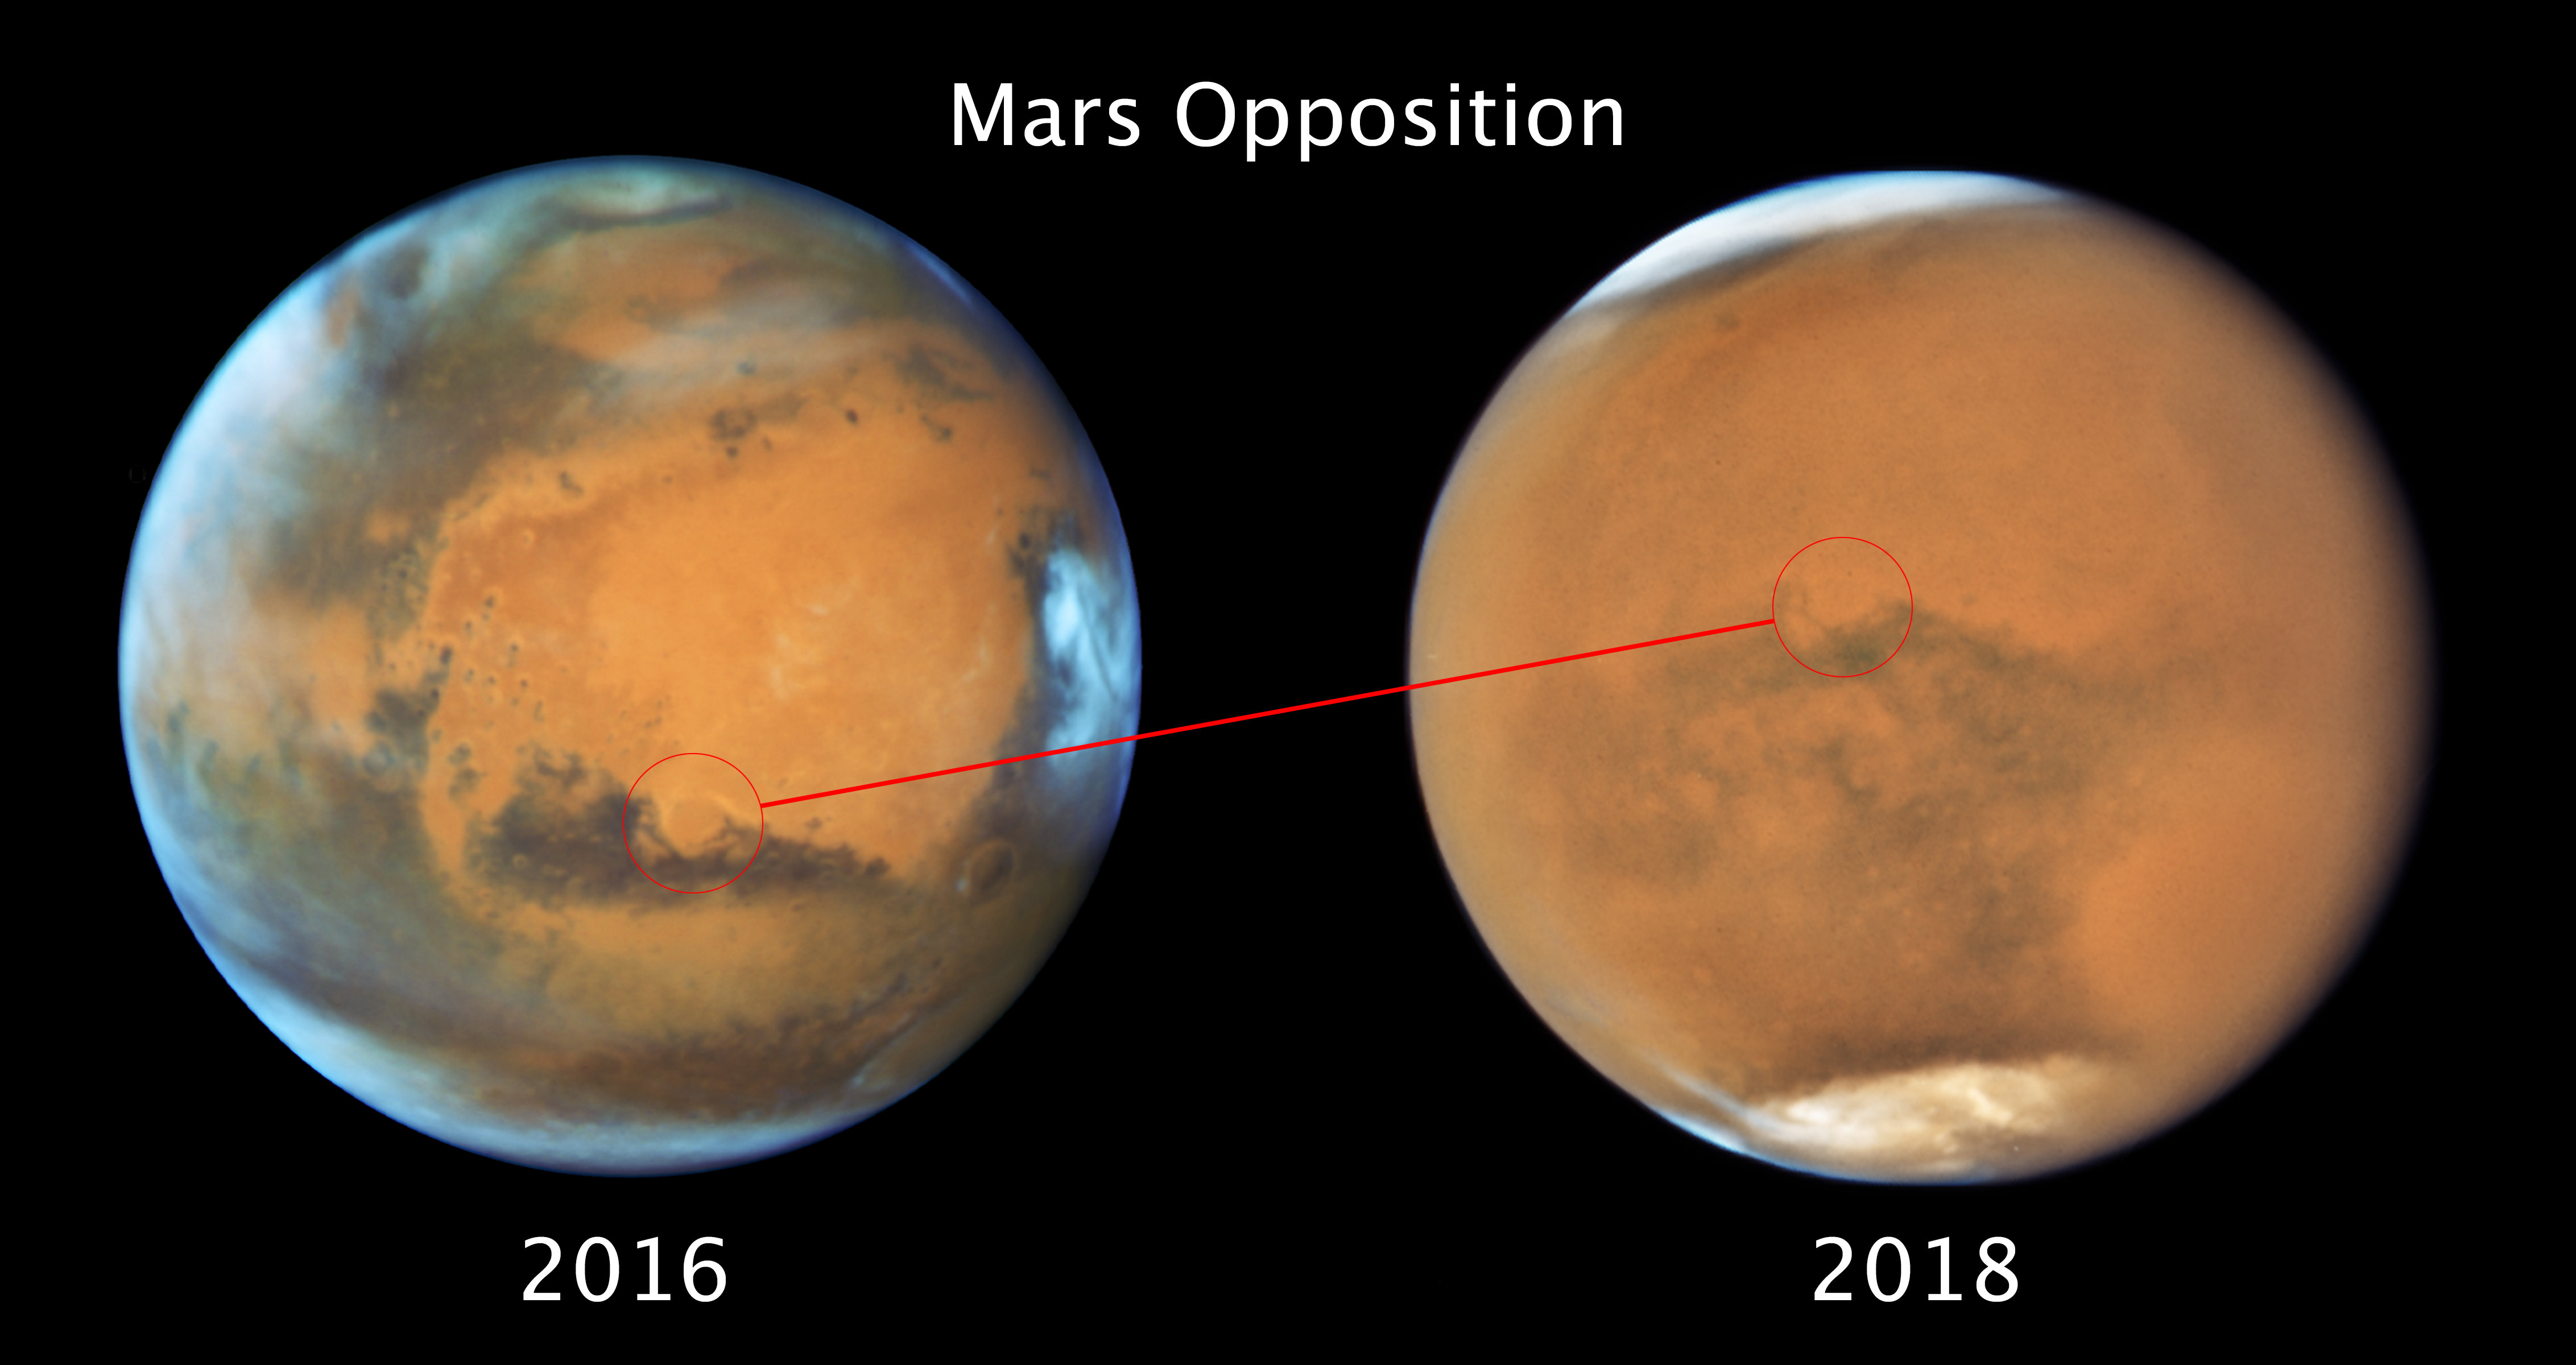

Mars 2016/2018 side-by-side

This image composite compares the observations of Mars made during the oppositions in 2016 and 2018.

The image taken in 2016 showed Mars during a cloudy day. However, the ancient and inactive shield volcano Syrtis Major, the bright and oval Hellas Planitia basin, the heavily eroded Arabia Terra, and the dark features of Sinus Sabaeous and Sinus Meridiani along the equator were all clearly visible.

The new image taken in 2018 captured the planet while it was enshrouded by a gigantic sandstorm. Still visible are the white polar caps, Terra Meridiani, the Schiaparelli Crater, and Hellas Basin — but all of these features are slightly blurred by the dust in the atmosphere.

Credit: NASA, ESA, and STScI